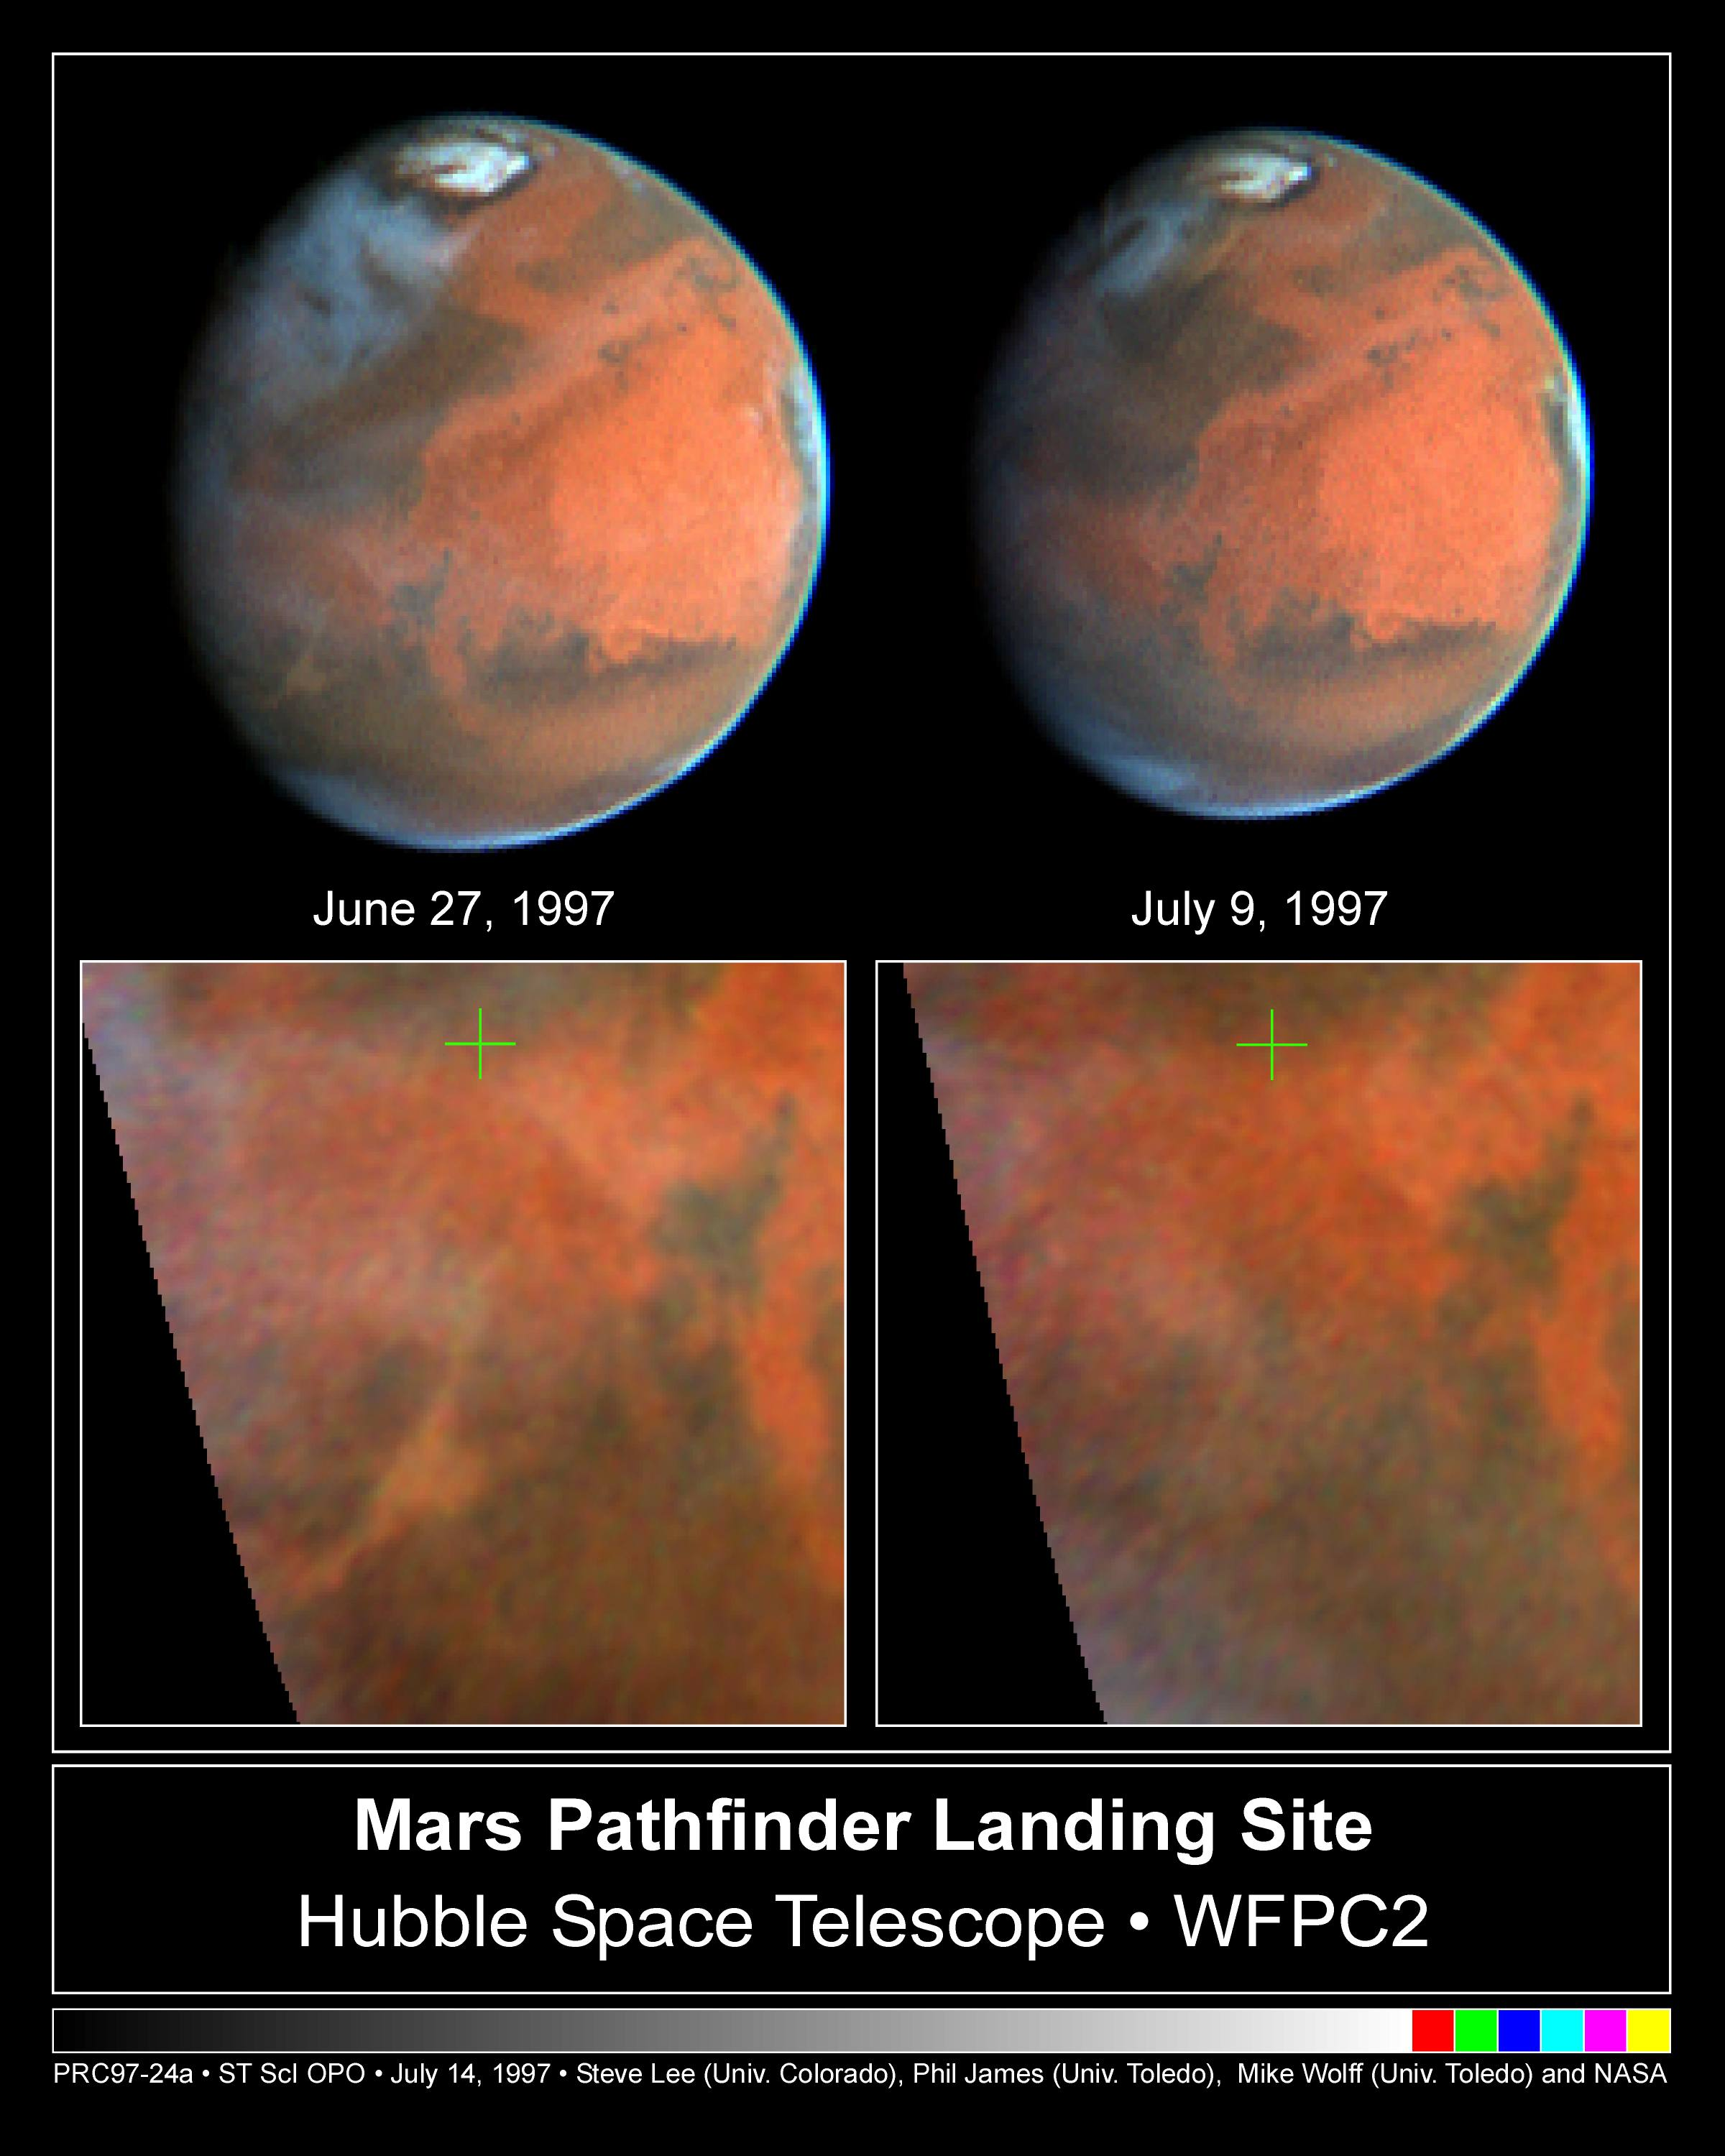

Mars Pathfinder Landing Site

NASA/ESA Hubble Space Telescope images of Mars, taken on June 27, 1997 (left) and July 9, 1997 (right), document the dissipation of a large dust storm during the 12 days separating the two observations.

The images were taken to monitor the weather conditions near Ares Vallis, the site where NASA's Pathfinder spacecraft landed on July 4. Maps of the equatorial region were constructed from the images and are shown at the bottom of the figure; a green cross marks the Pathfinder landing site. (All images are oriented with North to the top).

Credit: Steve Lee (Univ. Colorado), Phil James (Univ. Toledo), and Mike Wolff (Univ. Toledo), and NASA/ESA